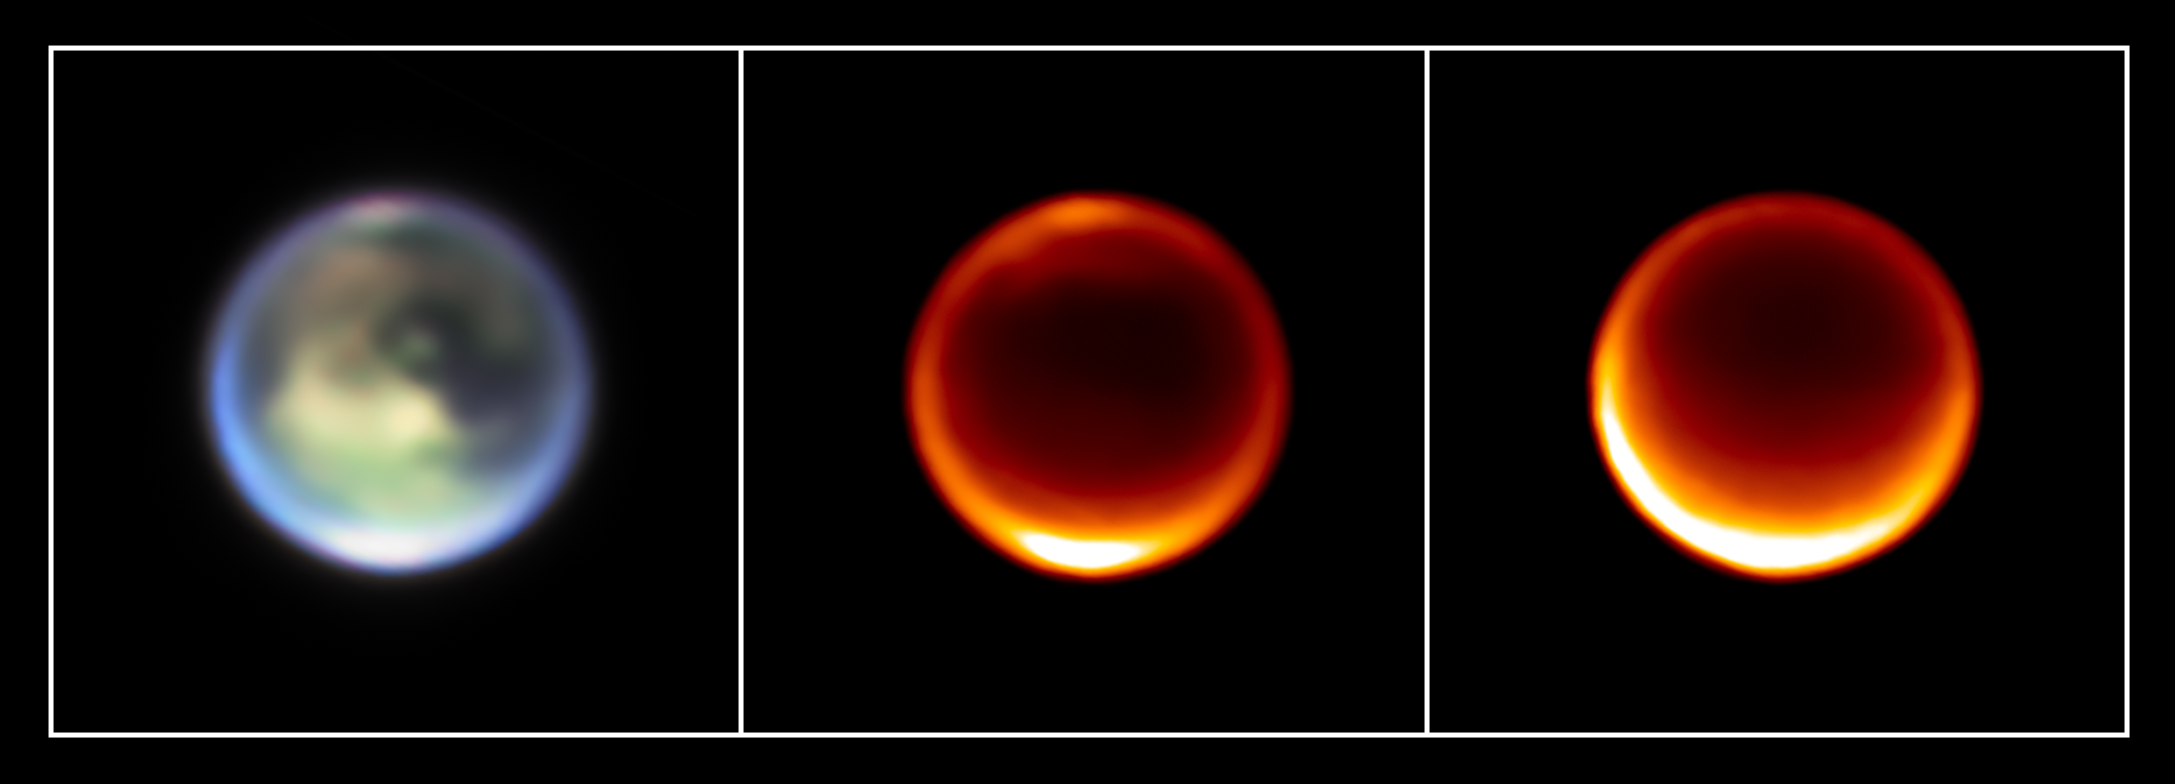

Titan (Webb image - 11 July 2023)

These infrared-light images of Titan were taken by the NASA/ESA/CSA James Webb Space Telescope on 11 July 2023. They show methane clouds appearing at different altitudes in Titan’s northern hemisphere.

On the left side is a representative-colour image (1.4 microns is coloured blue, 1.5 microns is green, and 2.0 microns is red: filters F140M, F150W, and F200W, respectively).

In the middle is a single-wavelength image taken by Webb at 2.12 microns. This wavelength is predominantly emitted from Titan’s lower troposphere.

The rightmost image shows emission at 1.64 microns, which favours higher altitudes, in Titan’s upper troposphere and stratosphere (an atmospheric layer above the troposphere).

Credit: NASA, ESA, CSA, STScI, Keck Observatory